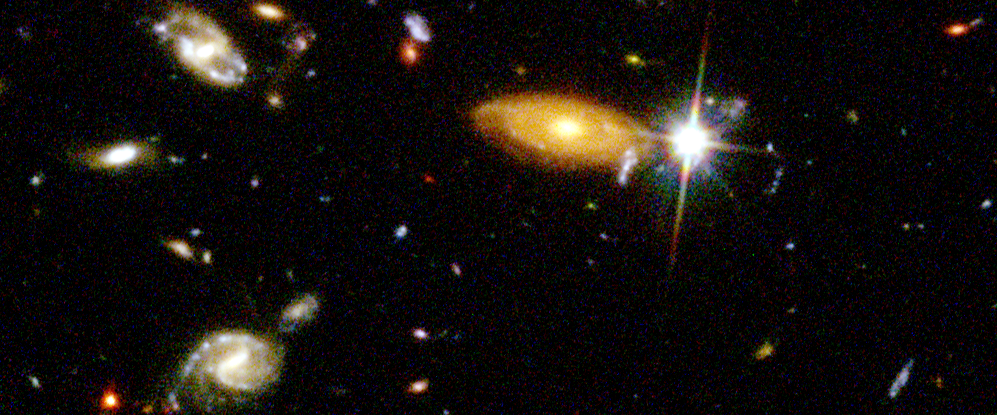

Hubble Deep Field details

Representing a narrow 'keyhole' view stretching all the way to the visible horizon of the universe, the HDF image covers a speck of sky a tiny fraction the diameter of the full Moon. This is so narrow, just a few foreground stars in our Milky Way Galaxy are visible and are vastly outnumbered by the menagerie of far more distant galaxies.

Credit: Robert Williams and the Hubble Deep Field Team (STScI) and NASA/ESA